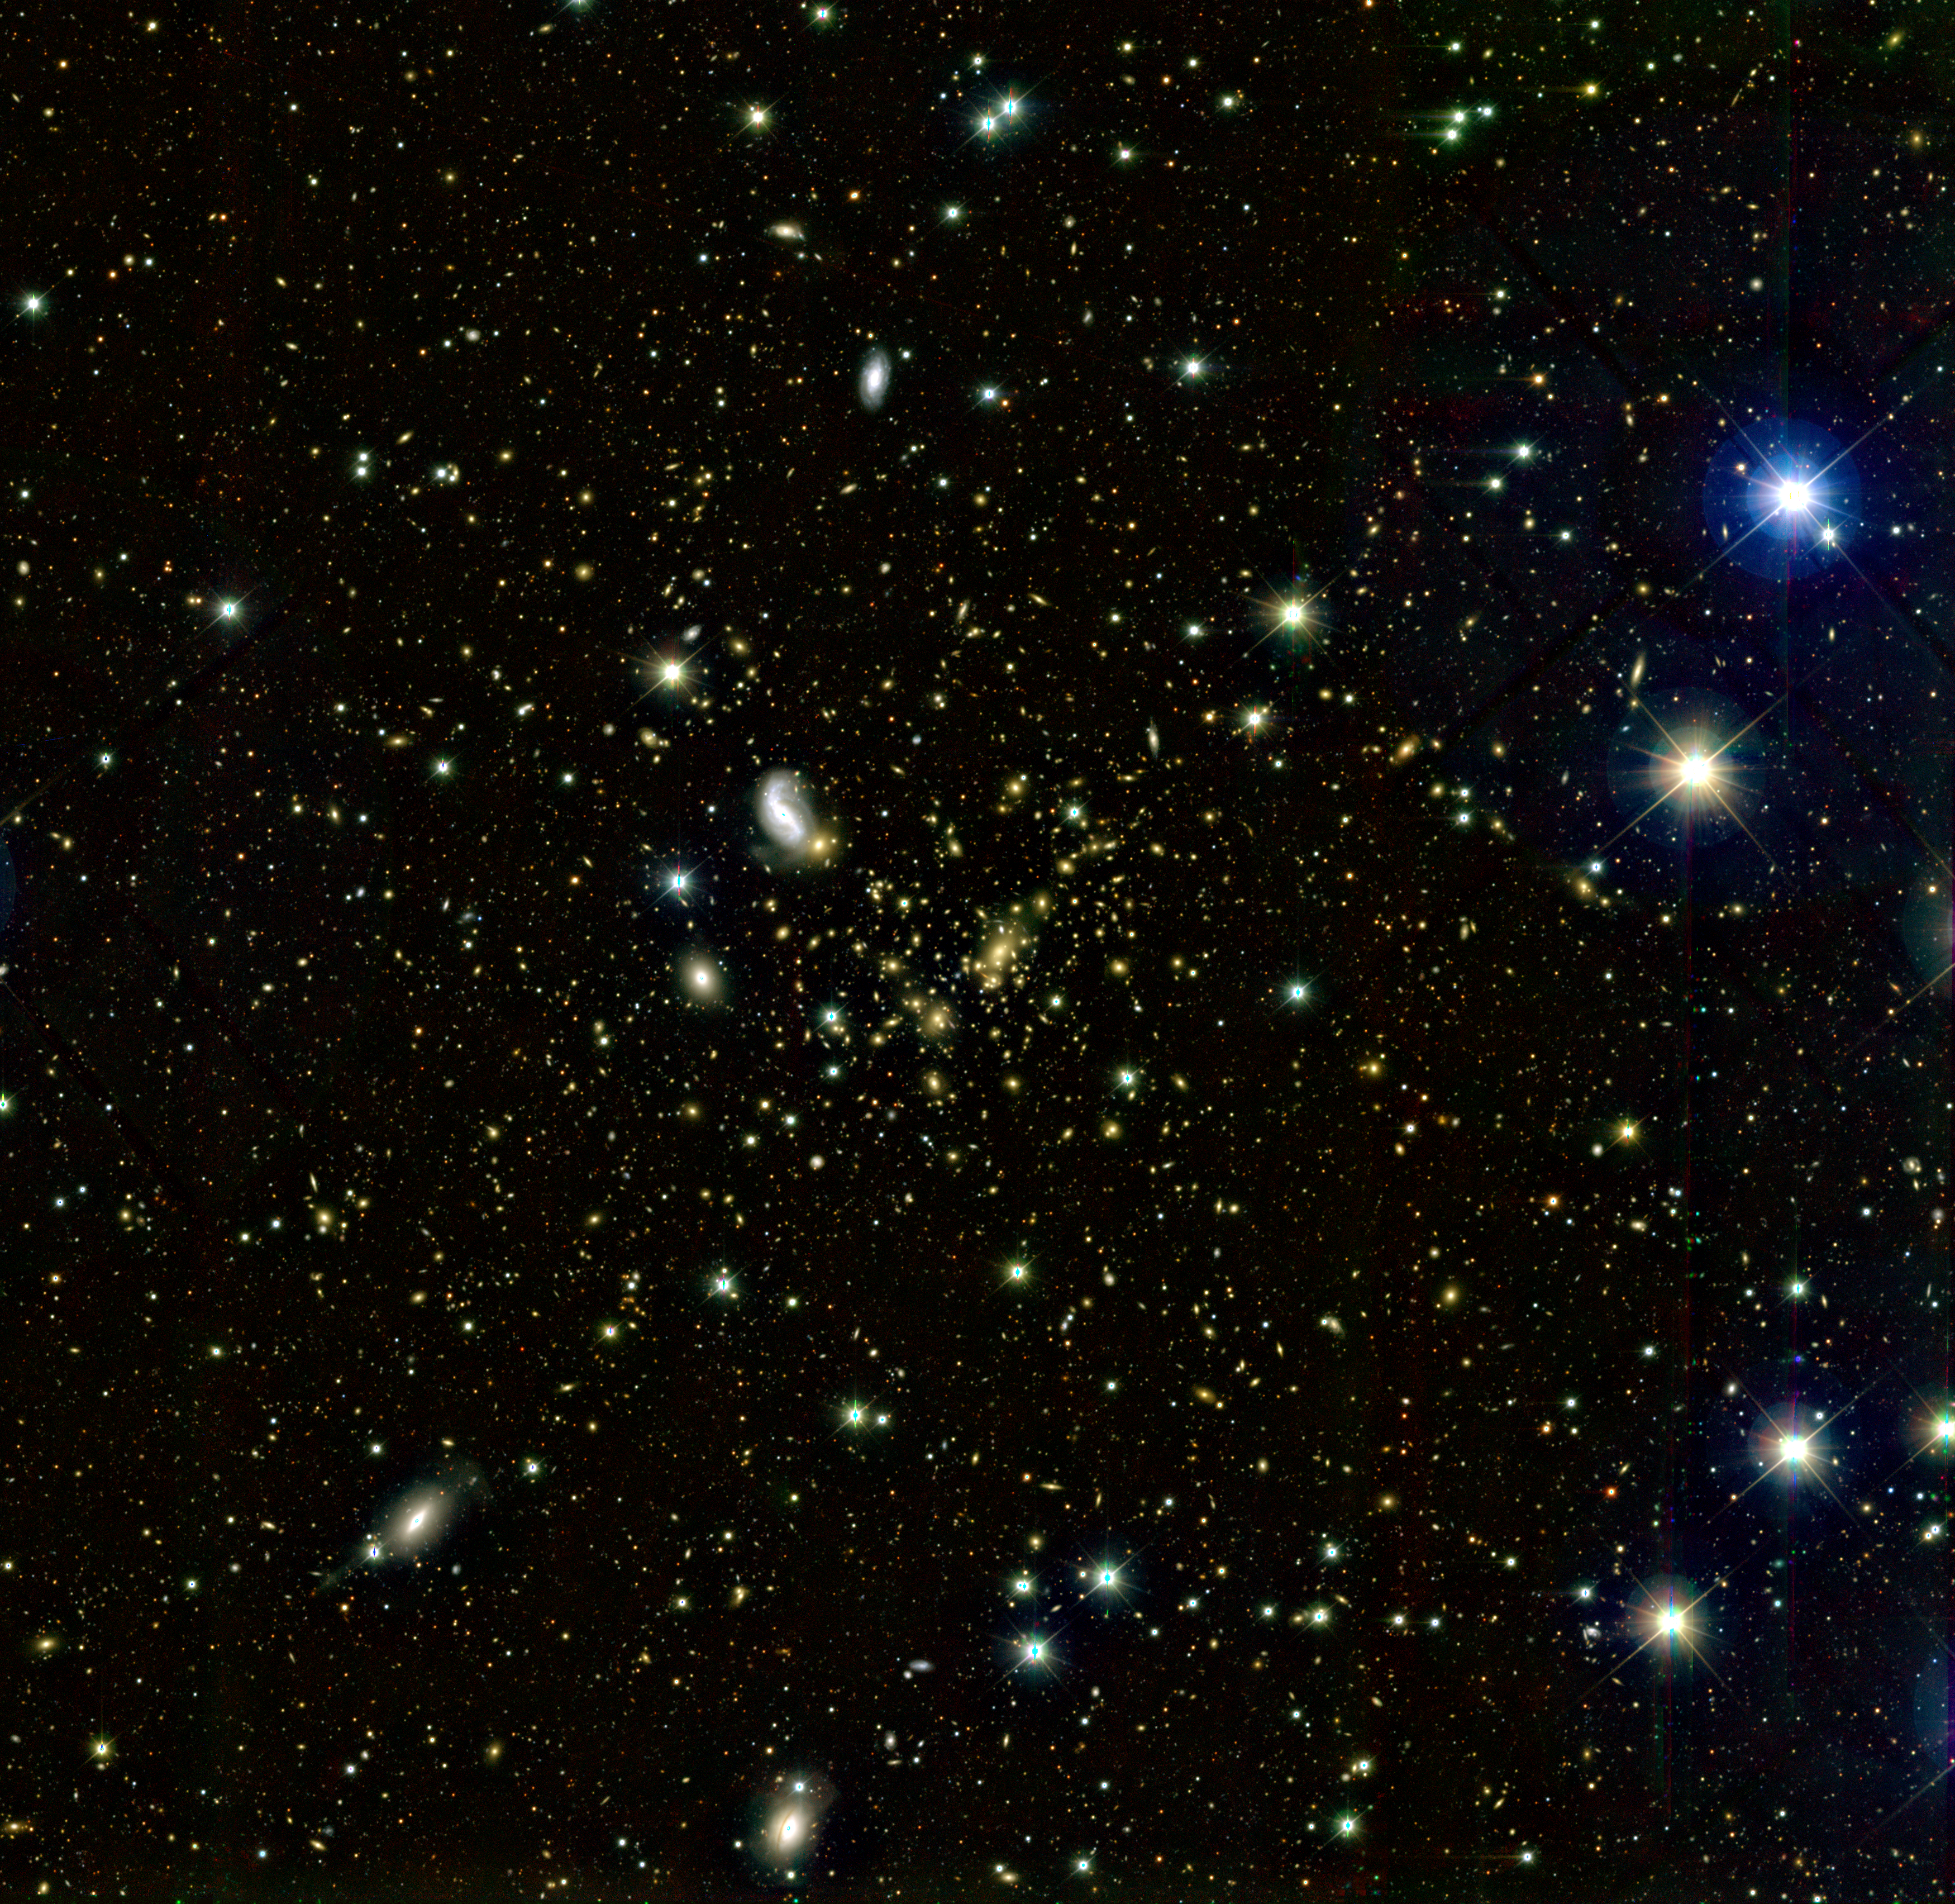

A ground-based wide-angle image of Abell 2218

This wide-angle image spans 0.4 by 0.4 degrees and was taken by the 12k camera on Canada-France-Hawaii Telescope on Mauna Kea, Hawaii, United States. The image is composited by three exposures through blue (B), red (R), and infrared (I) filters.

Credit: European Space Agency, J.-P. Kneib (Observatoire Midi-Pyrénées) and CFHT